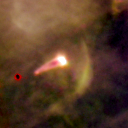

180-331

One of 42 new proplyds discovered in the Orion Nebula, 180-331 is one of the bright proplyds that lies relatively close to the nebula’s brightest star, Theta 1 Orionis C. This tadpole-shaped proplyd’s tail is actually a jet of matter flowing away from the excited cusp.

Credit: NASA/ESA and L. Ricci (ESO)